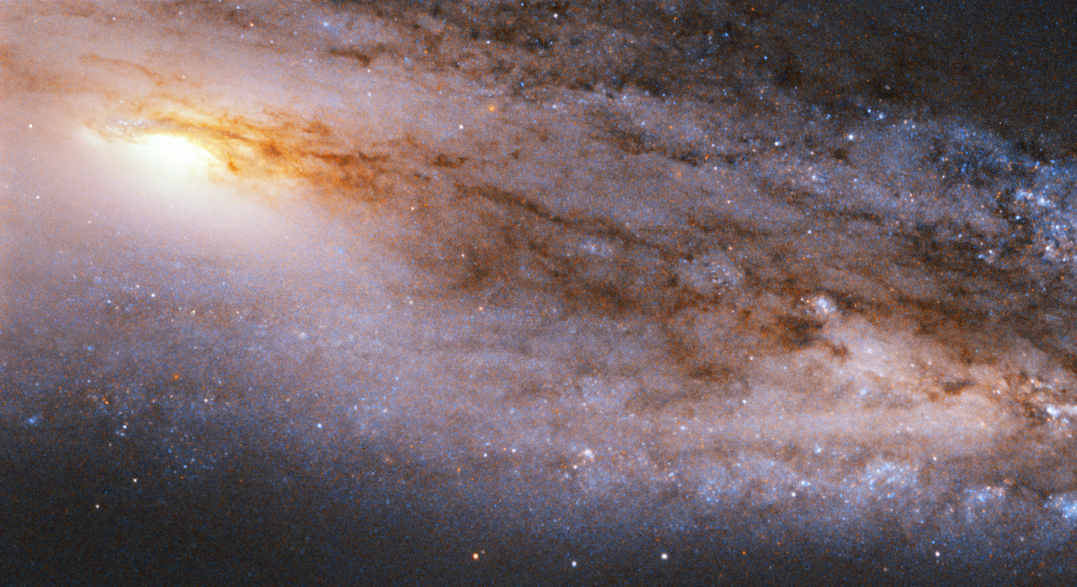

Trillions of stars

This Hubble Picture of the Week shows the spiral galaxy Messier 98, which is located about 45 million light-years away in the constellation of Coma Berenices (Berenice's Hair). It was discovered in 1781 by the French astronomer Pierre Méchain, a colleague of Charles Messier, and is one of the faintest objects in Messier’s astronomical catalogue.

Messier 98 is estimated to contain about a trillion of stars, and is full of cosmic dust — visible here as a web of red-brown stretching across the frame — and hydrogen gas. This abundance of star-forming material means that Messier 98 is producing stellar newborns at a high rate; the galaxy shows the characteristic signs of stars springing to life throughout its bright centre and whirling arms.

This image of Messier 98 was taken in 1995 with the Wide Field and Planetary Camera 2, an instrument that was installed on the NASA/ESA Hubble Space Telescope from 1993 till 2009. These observations were taken in infrared and visible light as part of a study of galaxy cores within the Virgo Cluster, and feature a portion of the galaxy near the centre.

Credit: ESA/Hubble & NASA, V. Rubin et al.